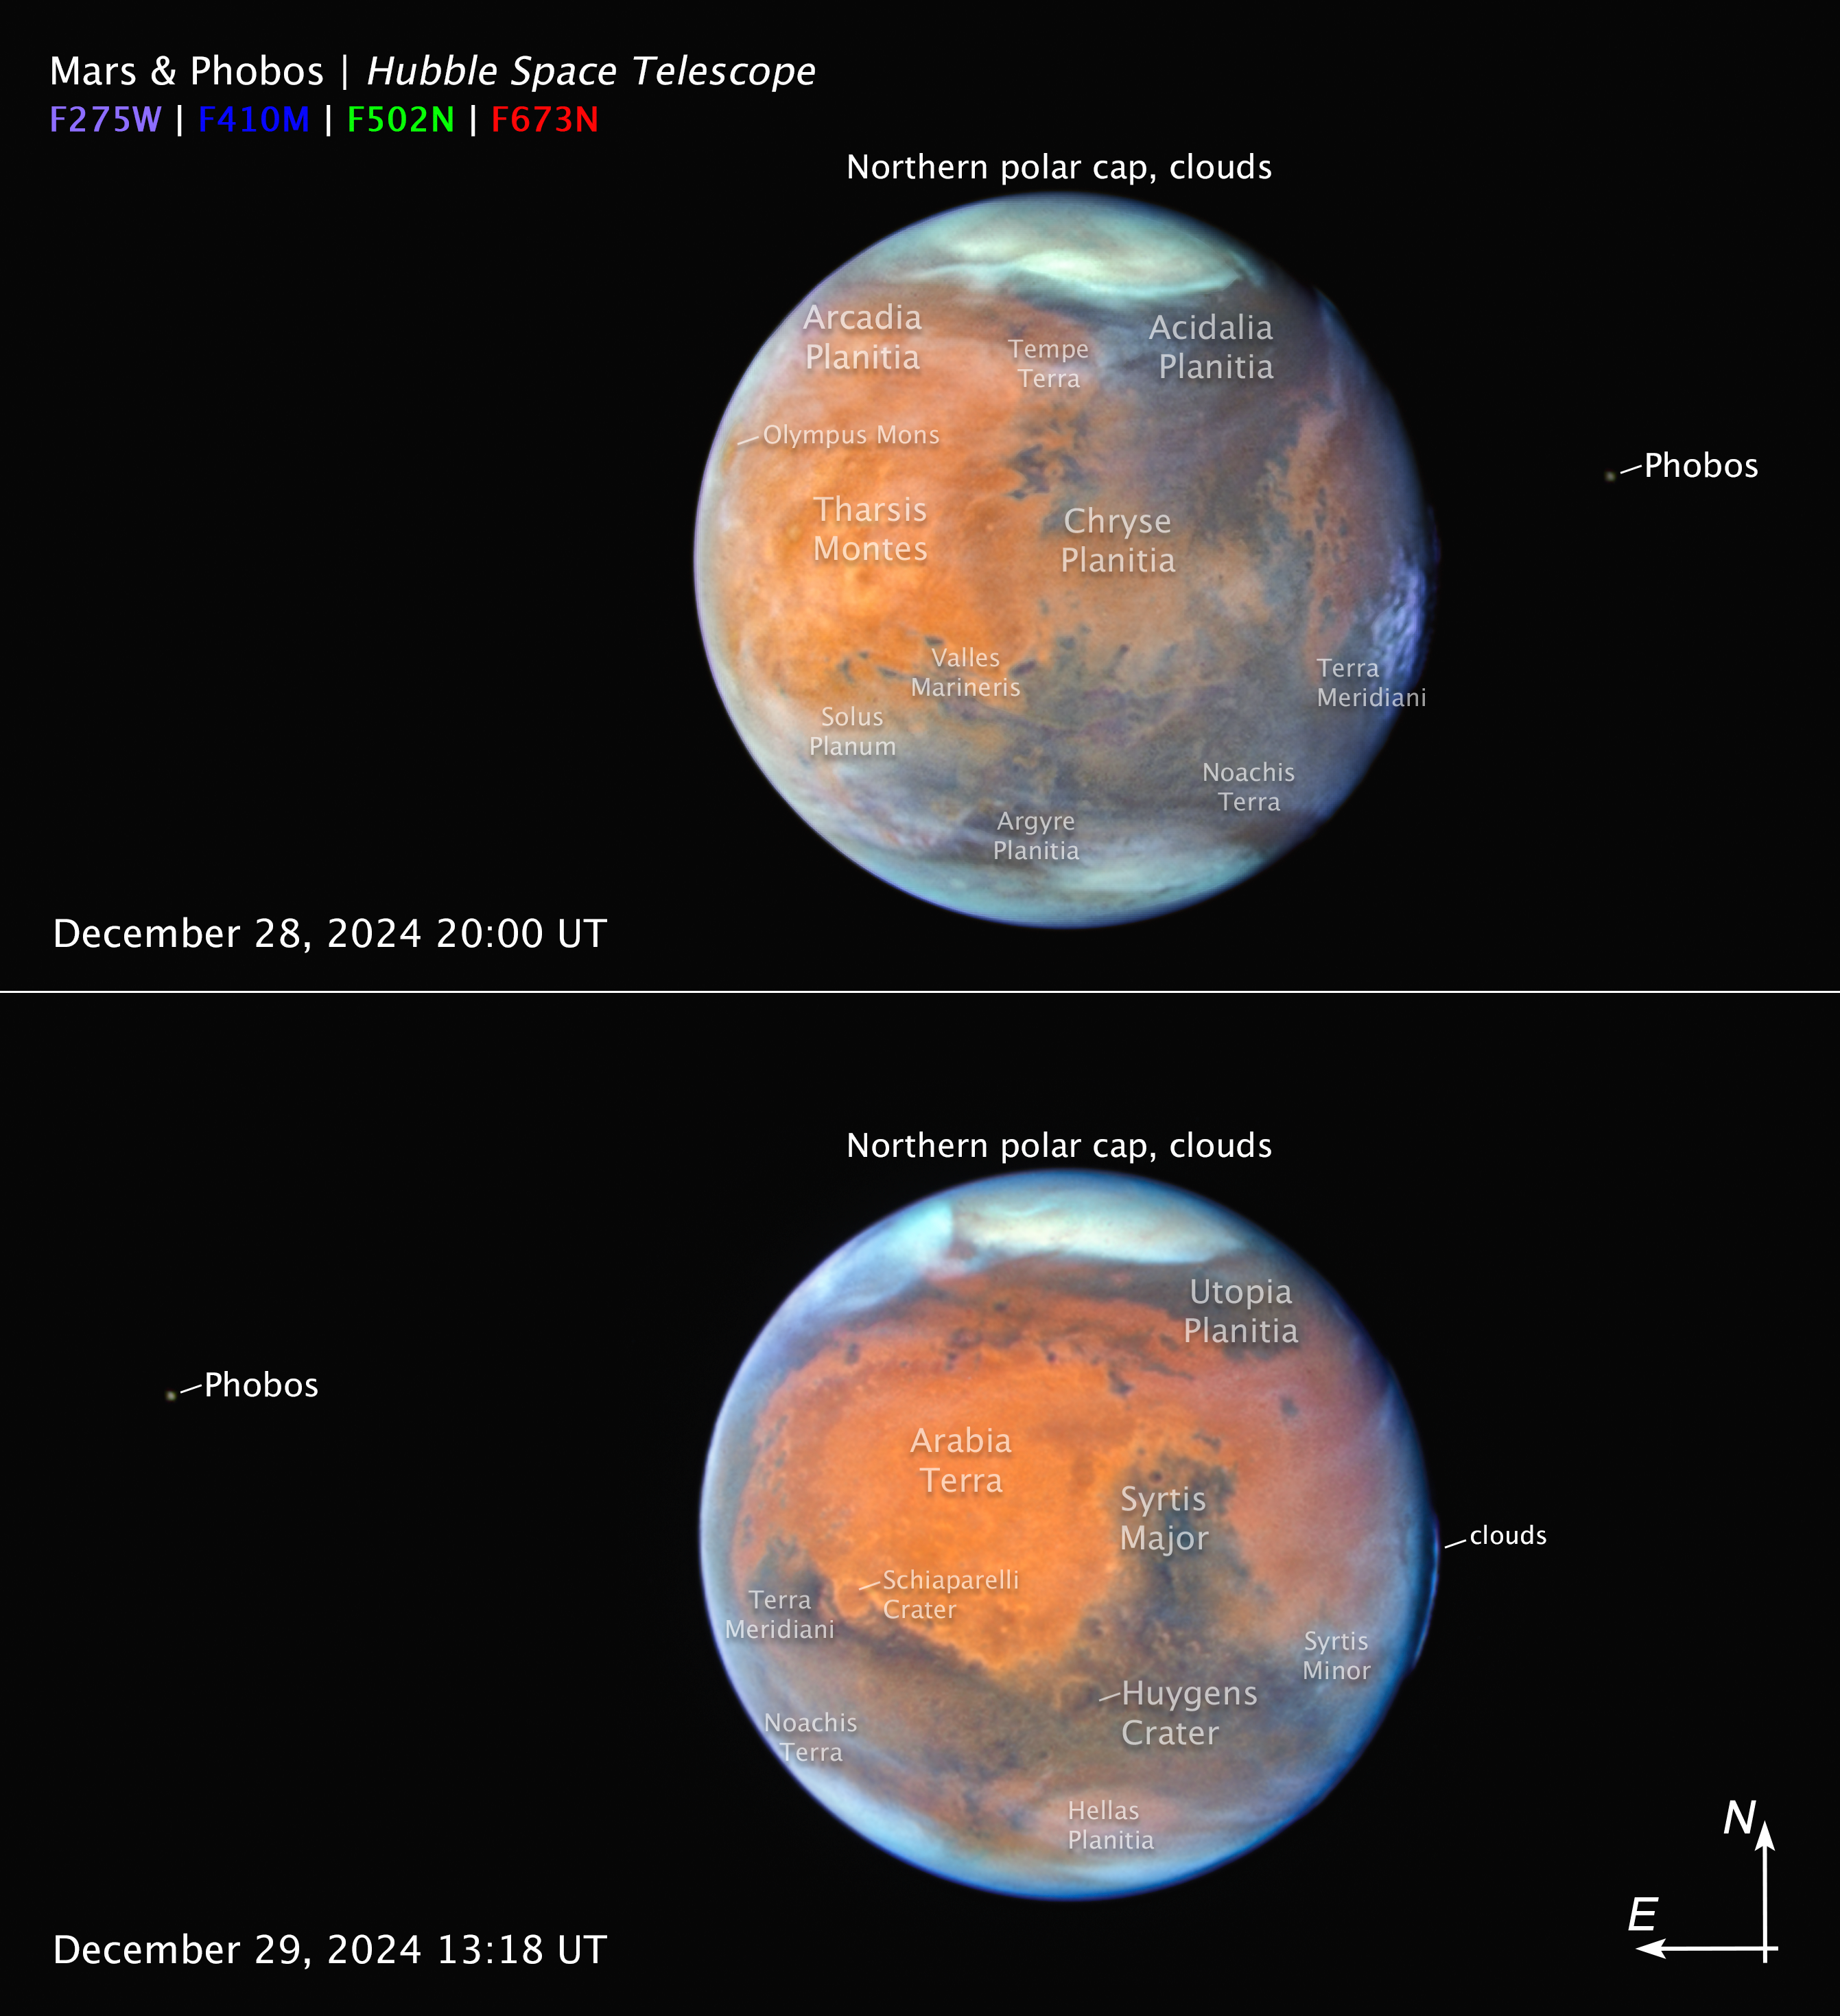

Mars and Phobos (annotated)

This pair of NASA/ESA Hubble Space Telescope images of Mars taken on 28 December (top) and 29 December (bottom) 2024. Each image shows a different side of the planet, with the accompanying moon Phobos. Various features are identified in the images, including the polar ice caps and clouds, as well as multiple terrestrial features.

At the midpoint of the observations, Mars was approximately 98 million kilometres from Earth. Thin water-ice clouds that are apparent in ultraviolet light give the Red Planet a frosty appearance. The icy northern polar cap was experiencing the start of Martian spring.

In the top image, the bright orange Tharsis plateau is visible with its chain of dormant volcanoes. The largest volcano, Olympus Mons, pokes above the clouds at the 10 o’clock position near the northwest limb. At an elevation of over 21 000 meters, it is 2.5 times the height of Mt. Everest above sea level. Valles Marineris, Mars’ over 4,000-kilometre-long canyon system, is a dark, linear, horizontal feature near center left.

In the bottom image, high-altitude evening clouds can be seen along the planet’s eastern limb. The 2,250-kilometre-wide Hellas basin, an ancient asteroid impact feature, appears far to the south. Most of the hemisphere is dominated by the classical “shark fin” feature, Syrtis Major.

Credit: NASA, ESA, STScI